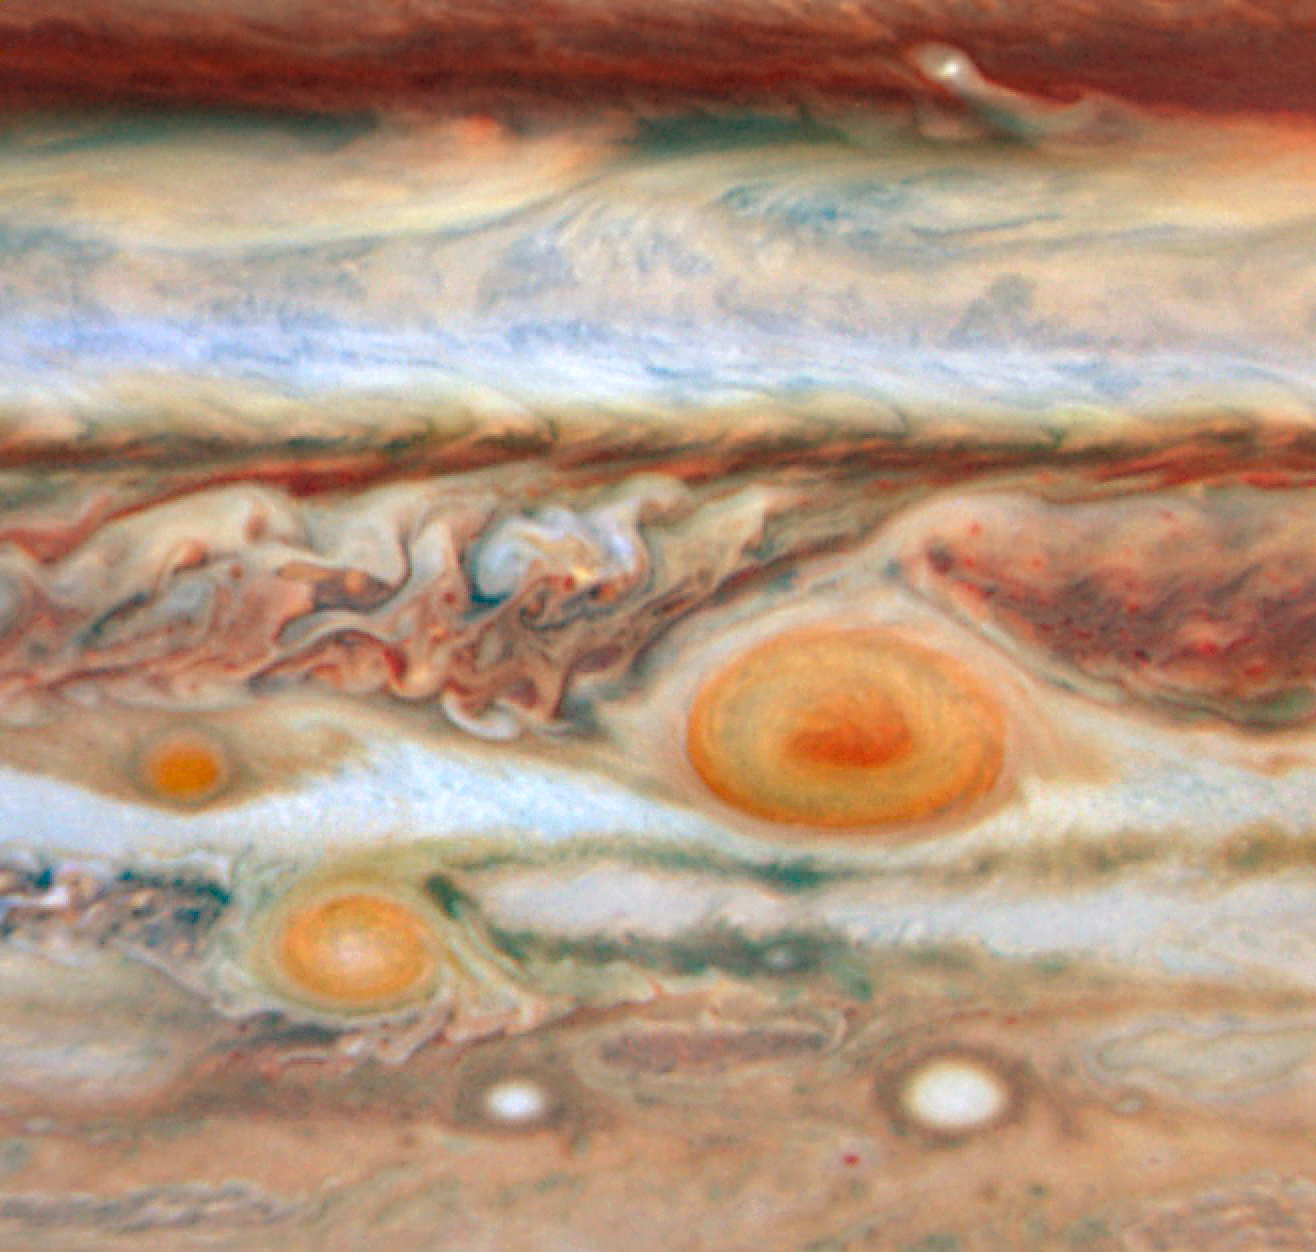

New Red Spot Appears on Jupiter

In what's beginning to look like a case of planetary measles, a third red spot has appeared alongside its cousins - the Great Red Spot and Red Spot Jr. - in the turbulent Jovian atmosphere.

This third red spot, which is a fraction of the size of the two other features, lies to the west of the Great Red Spot in the same latitude band of clouds.

The new red spot was previously a white oval-shaped storm. The change to a red colour indicates its swirling storm clouds are rising to heights like the clouds of the Great Red Spot. One possible explanation is that the red storm is so powerful it dredges material from deep beneath Jupiter's cloud tops and lifts it to higher altitudes where solar ultraviolet radiation - via some unknown chemical reaction - produces the familiar brick colour.

Credit: NASA, ESA and M. Wong and I. de Pater (University of California, Berkeley)